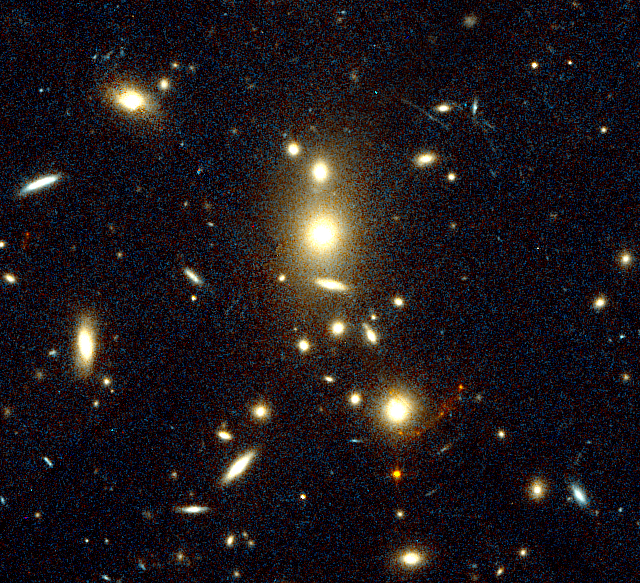

Gravitationally Lensed Image of Highest Redshift Galaxy

A NASA/ESA Hubble Space Telescope image of the galaxy cluster CL1358+62 has uncovered a gravitationally-lensed image of a more distant galaxy located far beyond the cluster. The gravitationally-lensed image appears as a red crescent to the lower right of center. The galaxy's image is brightened, magnified, and smeared into an arc-shape by the gravitational influence of the intervening galaxy cluster, which acts like a gigantic lens.

Credit: Marijn Franx (University of Groningen, The Netherlands), Garth Illingworth (University of California, Santa Cruz), and NASA/ESA